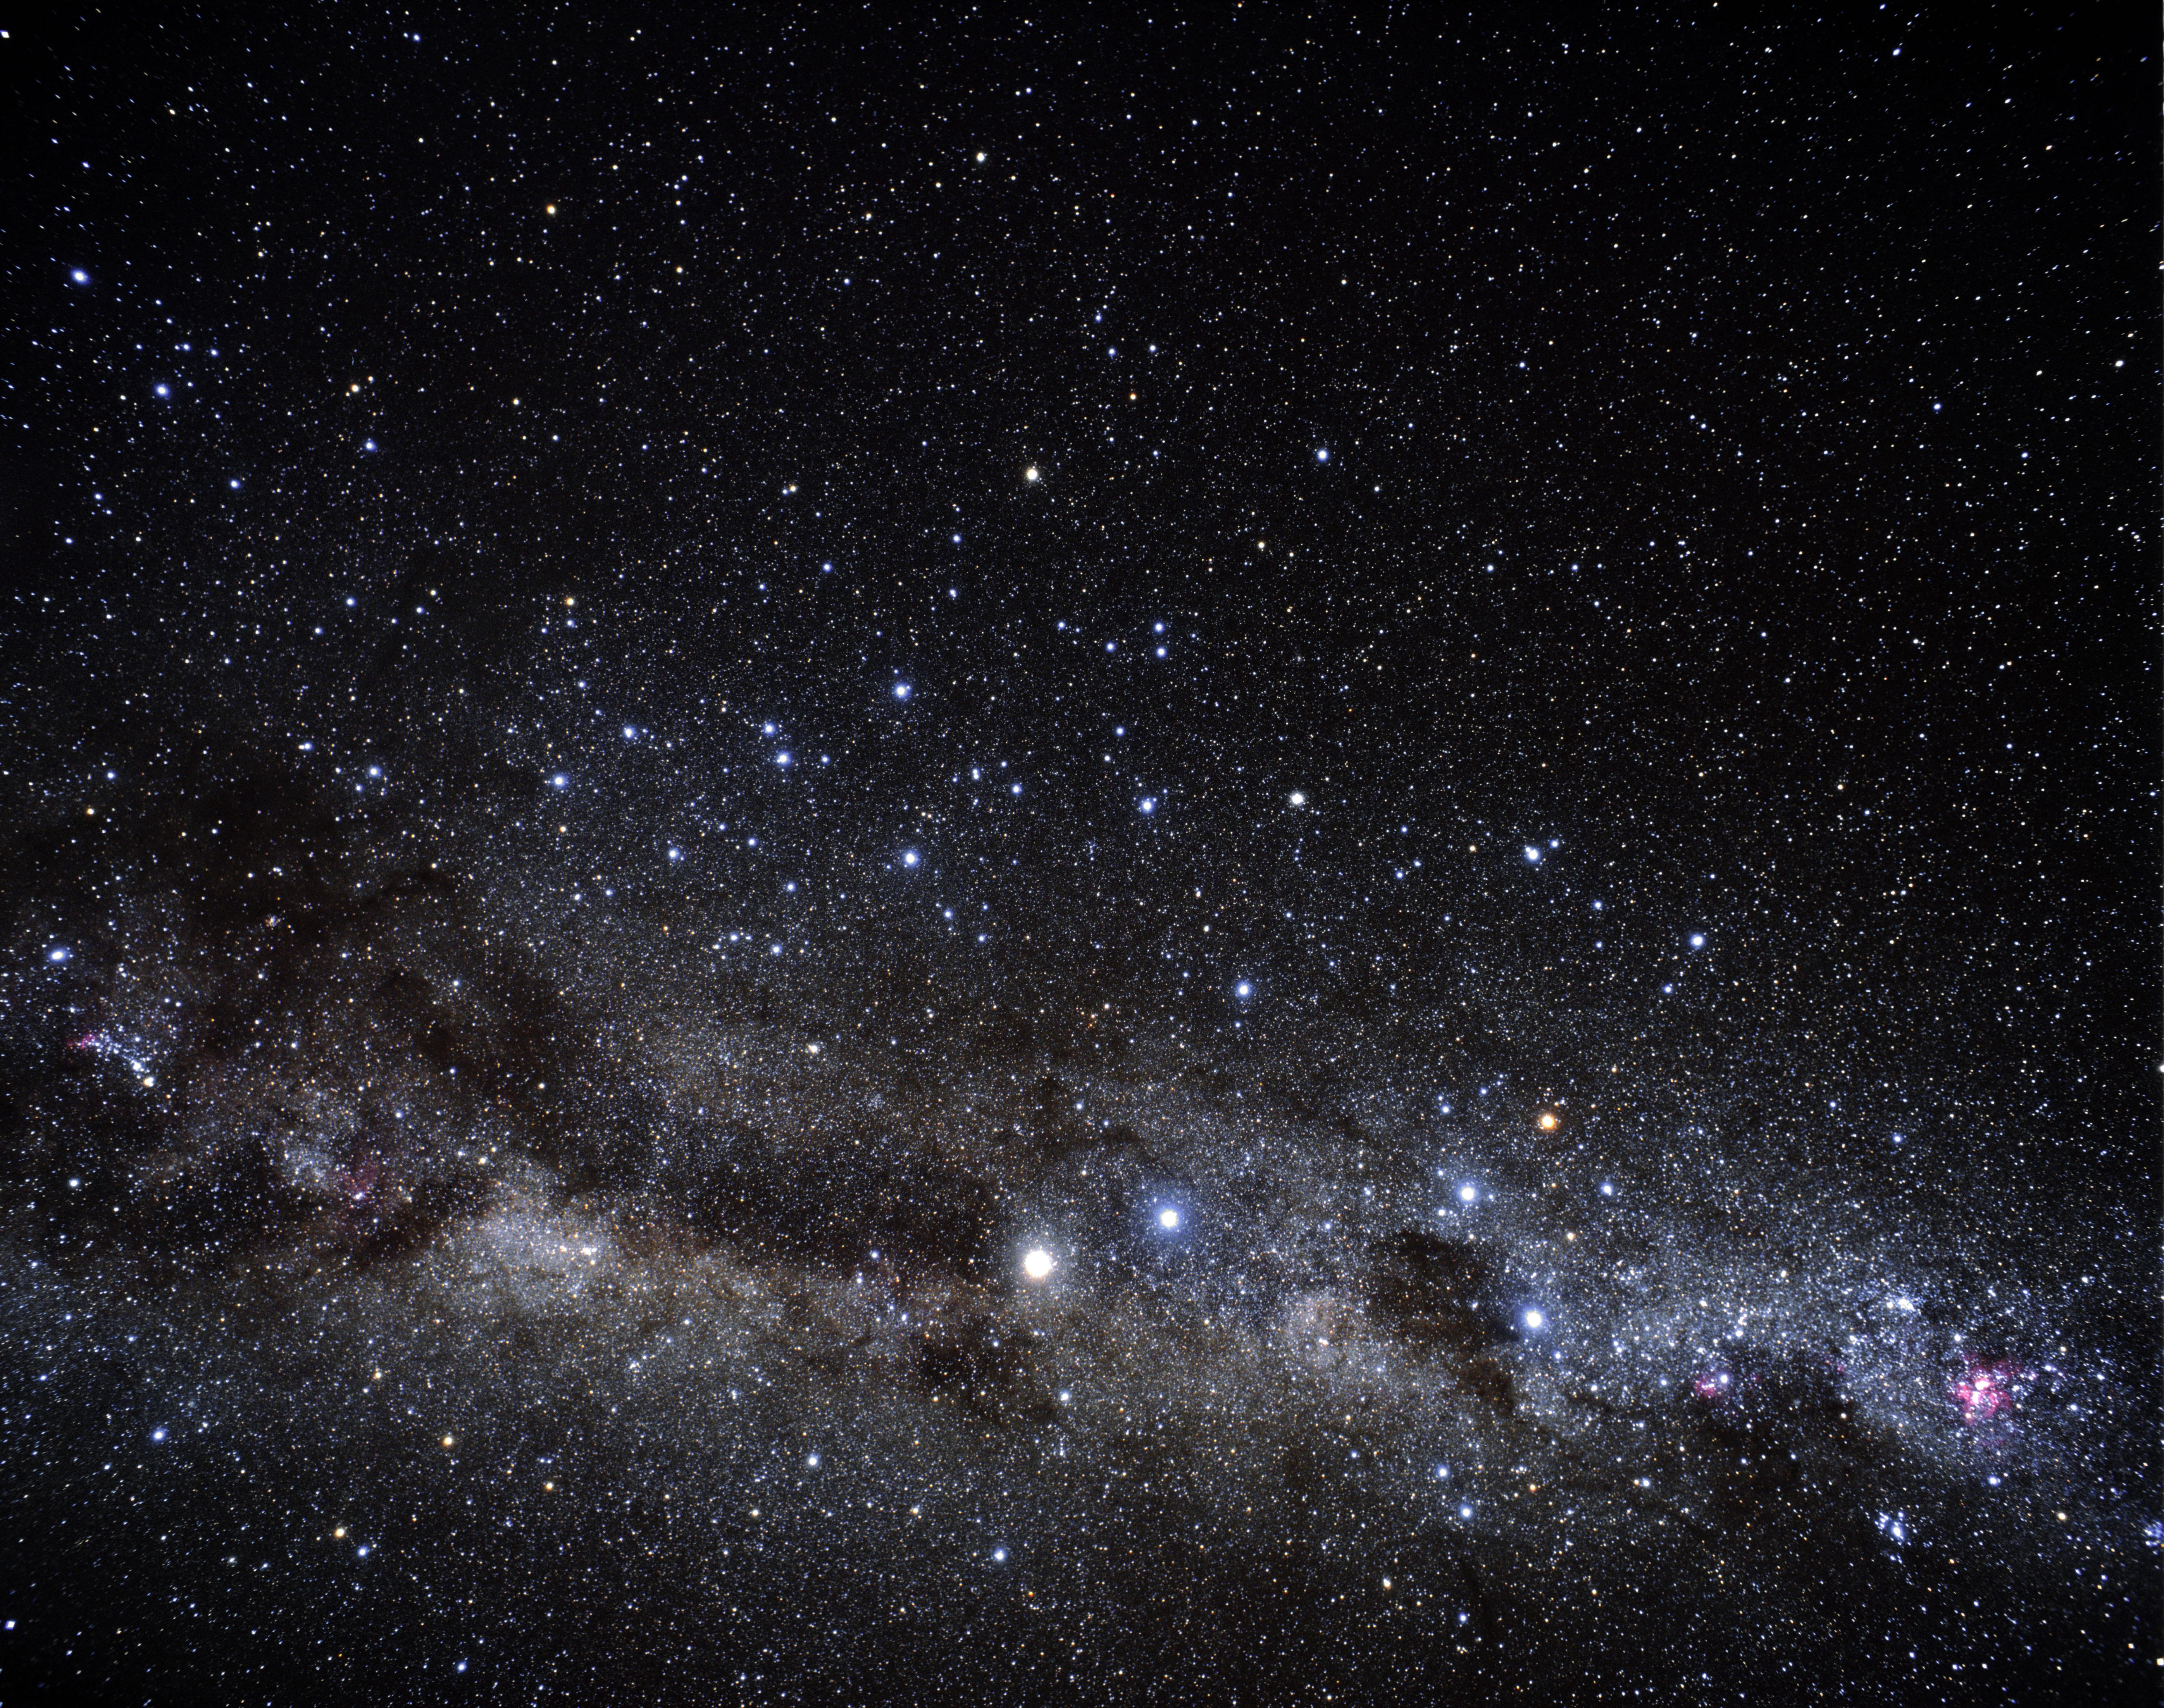

Omega Centauri wide-field (ground-based image)

In this image there is the Southern Milky-Way patch. At the centre, the constellation of Centaurus, where the globular cluster Omega Centauri is located.

Credit: A. Fujii